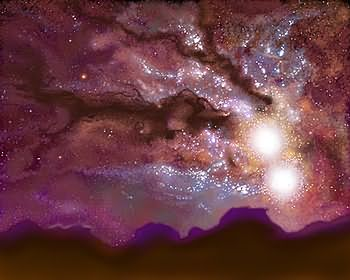

Milky Way/Andromeda collision (artist's impression)

The Hubble telescope has uncovered over 1,000 bright; young star clusters bursting to life in a brief, intense, brilliant "fireworks show" at the heart of a pair of colliding galaxies. This artist's impression shows what it may look like when the Milky Way and Andromeda collide.

Credit: James Gitlin